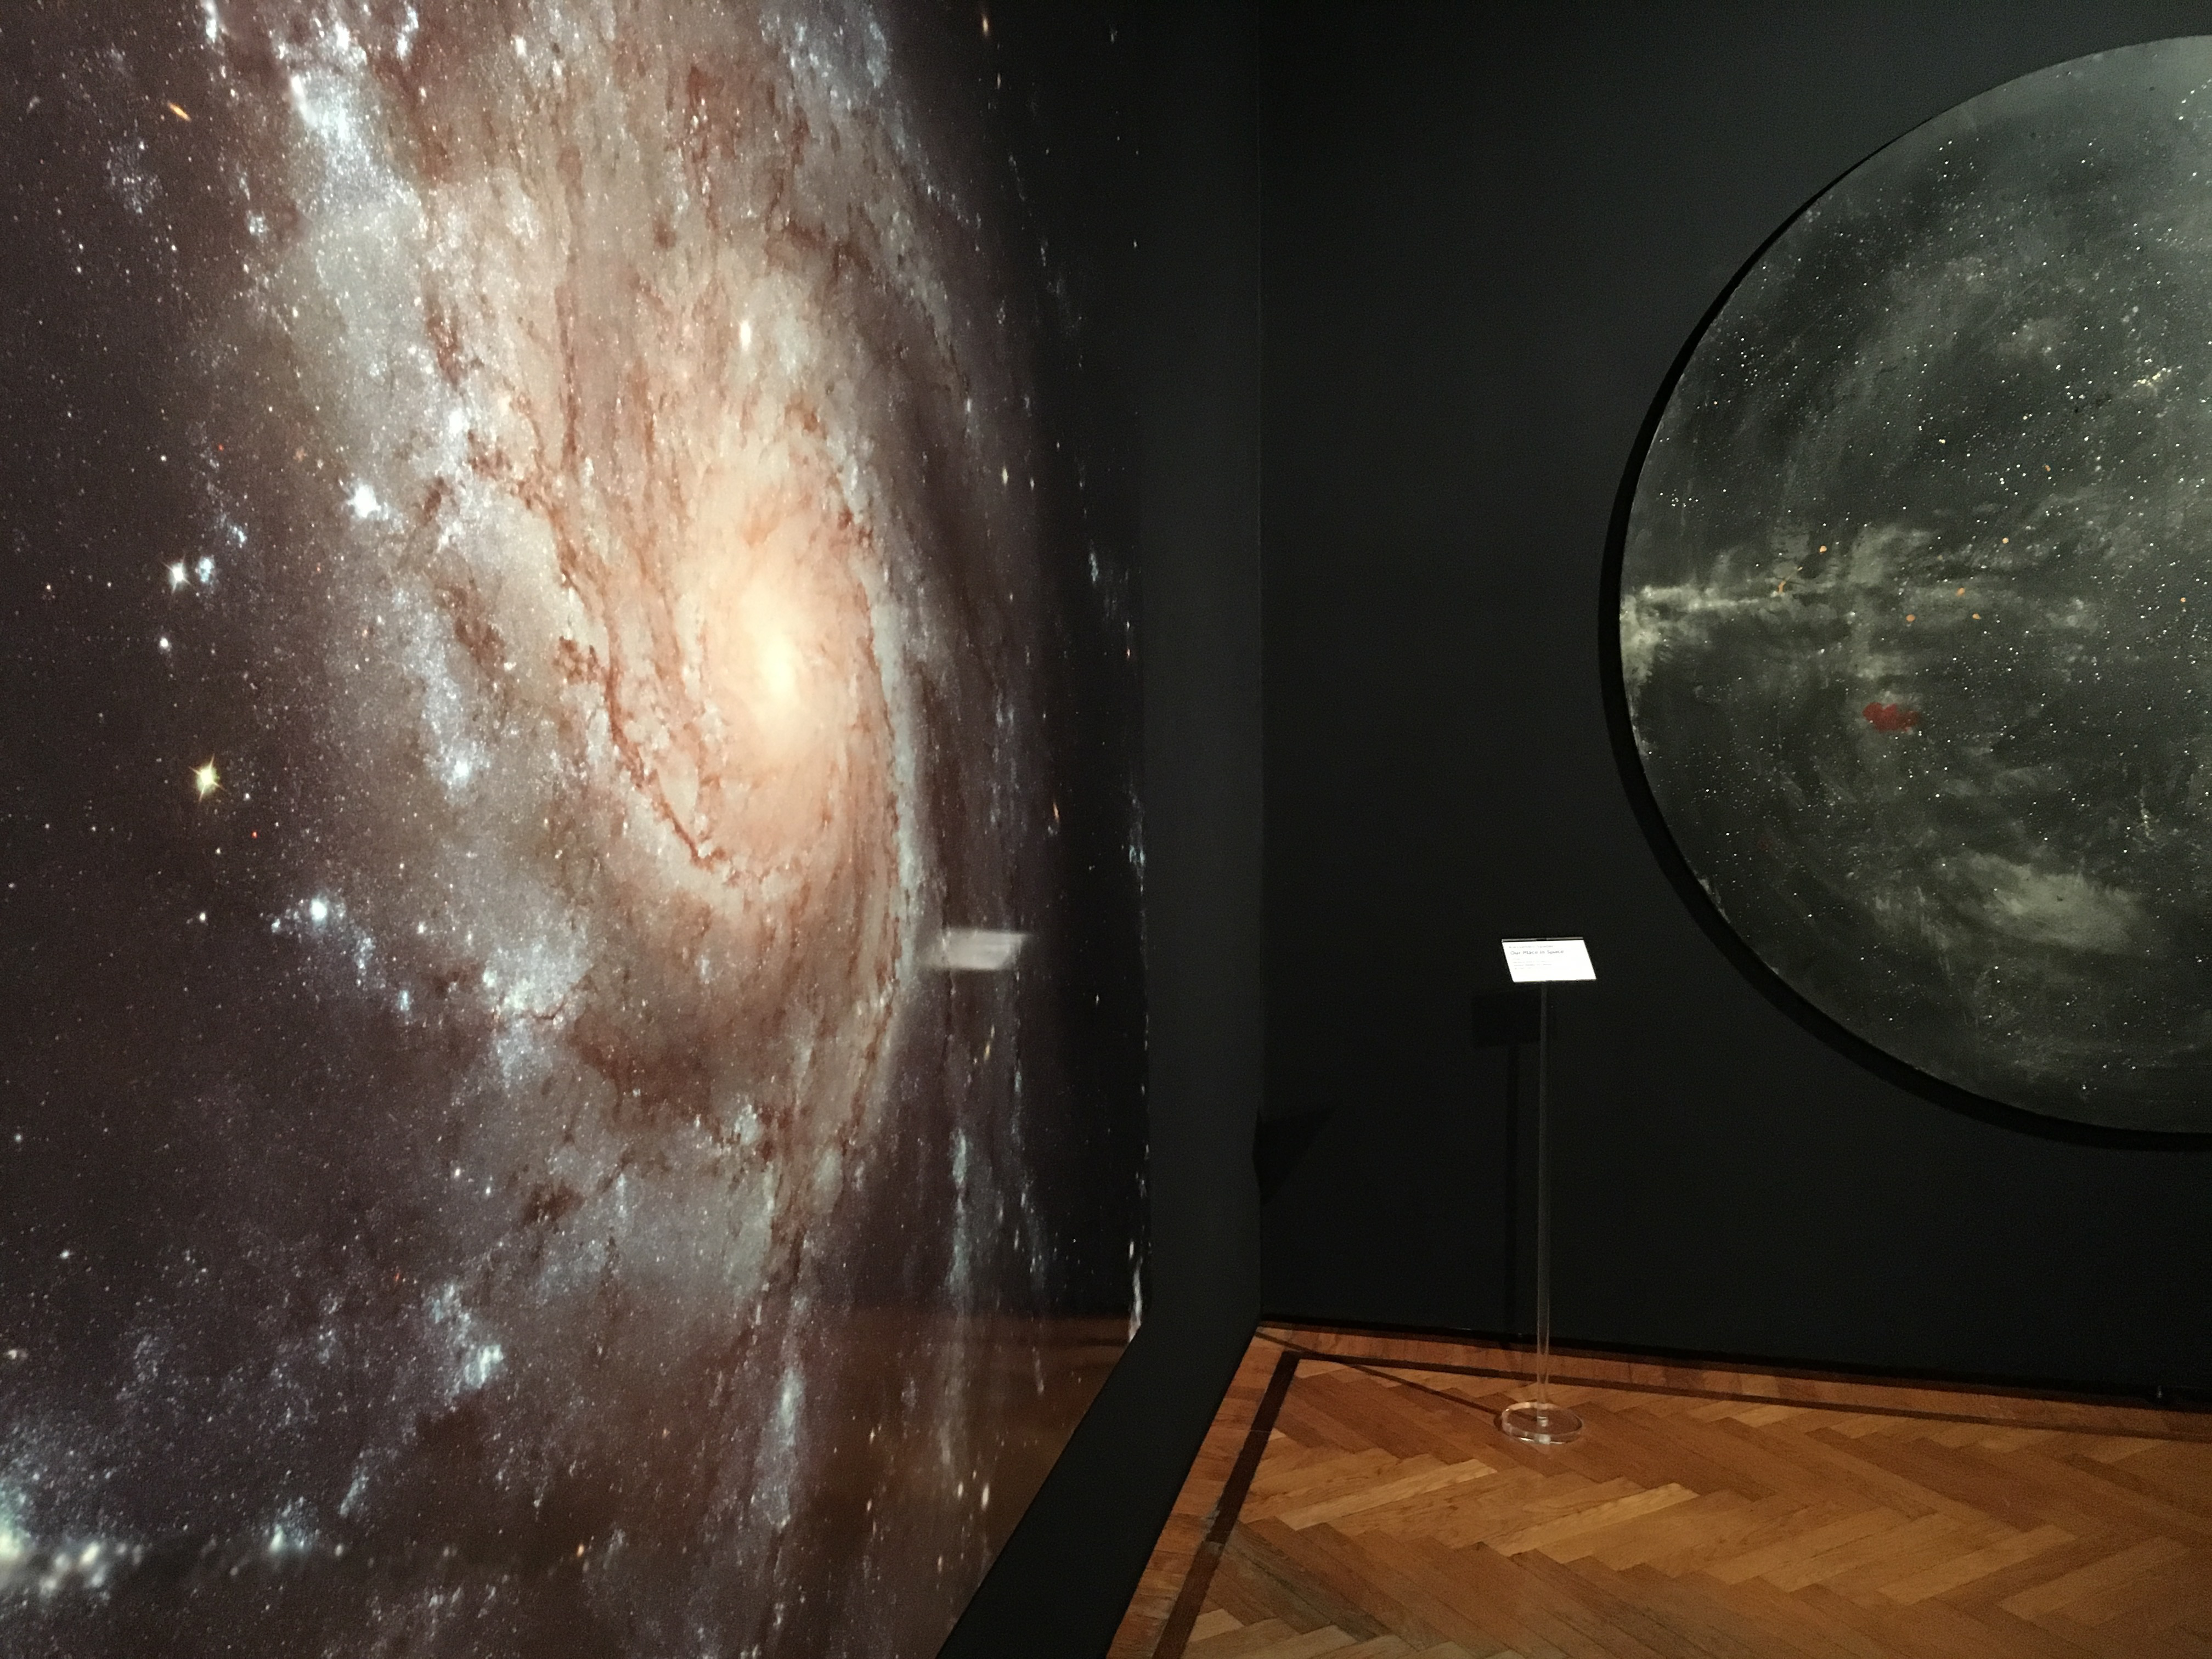

Beauty in art and space

The Pinwheel Galaxy is so large it could contain two of our Milky Ways. Its winding spiral arms inspired Alessandro Spadari to create his paintings which can be seen in the Hubble travelling exhibition Our Place in Space.

Credit: ESA/Hubble, P. Jeffries